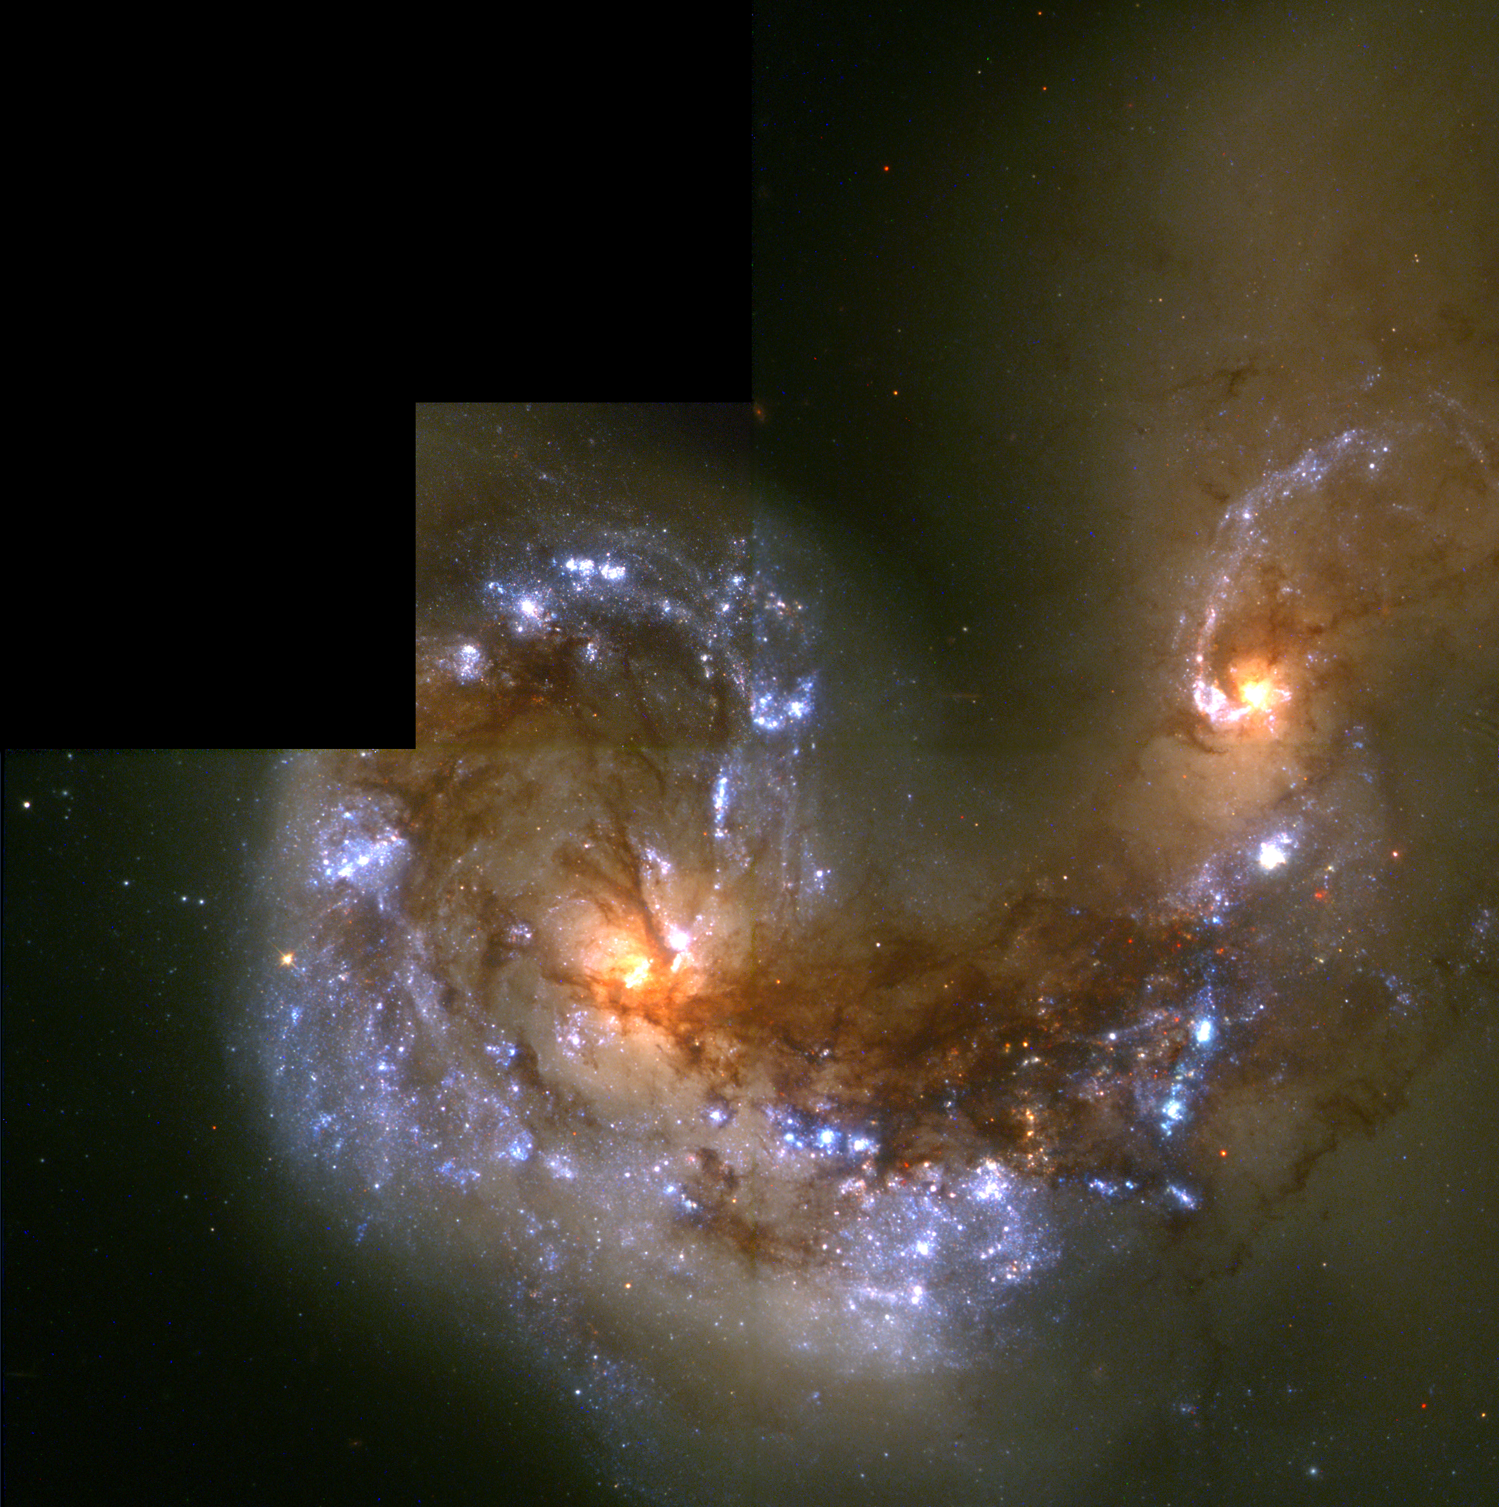

Colliding galaxies NGC 4038 and NGC 4039

The respective cores of the twin galaxies are the orange blobs, left and right of image center, crisscrossed by filaments of dark dust. A wide band of chaotic dust, called the overlap region, stretches between the cores of the two galaxies. The sweeping spiral- like patterns, traced by bright blue star clusters, shows the result of a firestorm of star birth activity which was triggered by the collision.

Credit: Brad Whitmore (STScI), and NASA/ESA